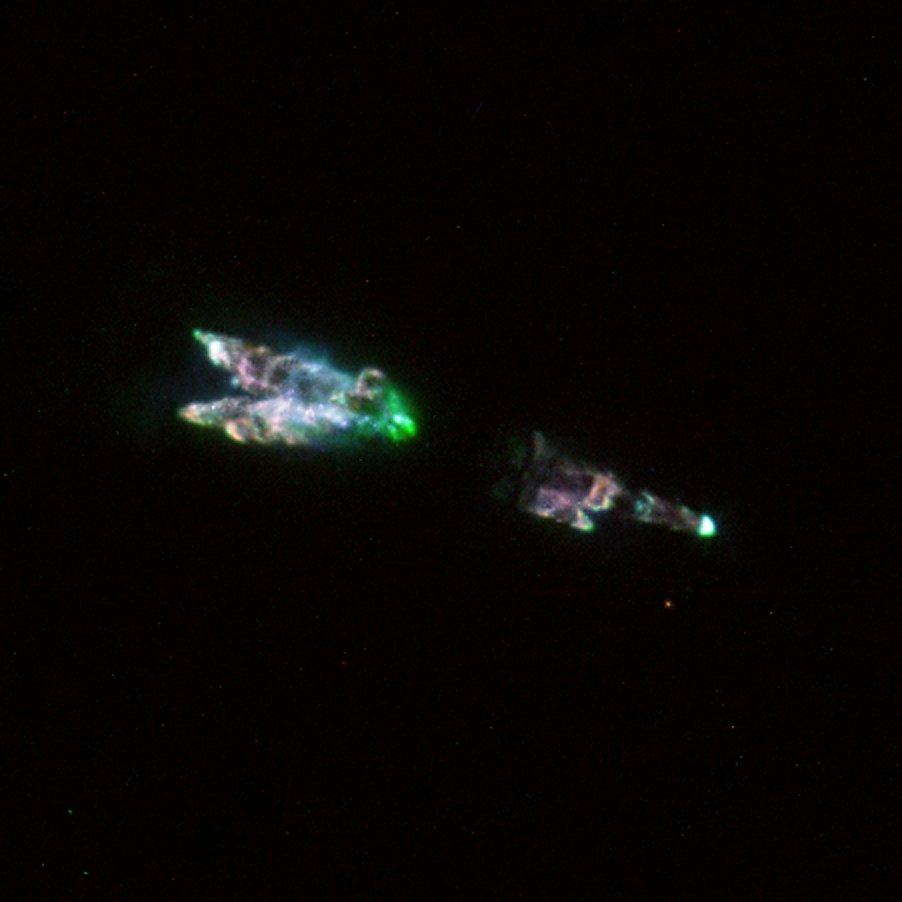

Stellar cocoon CRL 618

This image comes from the large archive of scientific observations performed with the Hubble Space Telescope. Currently more than 250, 000 scientific Hubble observations are contained in this highly valuable archive and more are added all the time.

In this image singly ionised sulphur is shown in red, green represents neutral hydrogen, the blue-green colour comes from neutral oxygen and blue light is continuum light seen through a so-called Strvmgren y filter. The full extent of the nebula is 12 arcseconds from tip to tip.

The original Hubble observations were obtained in 1998 by Susan R. Trammell from University of North Carolina, and were turned into a colour image by the Hubble European Space Agency Information Centre at European Southern Observatory, Munich and A.G.G.M. Tielens from the Kapteyn Astronomical Institute in the Netherlands.

Credit: ESA & A.G.G.M. Tielens (SRON/Kapteyn Astronomical Institute)